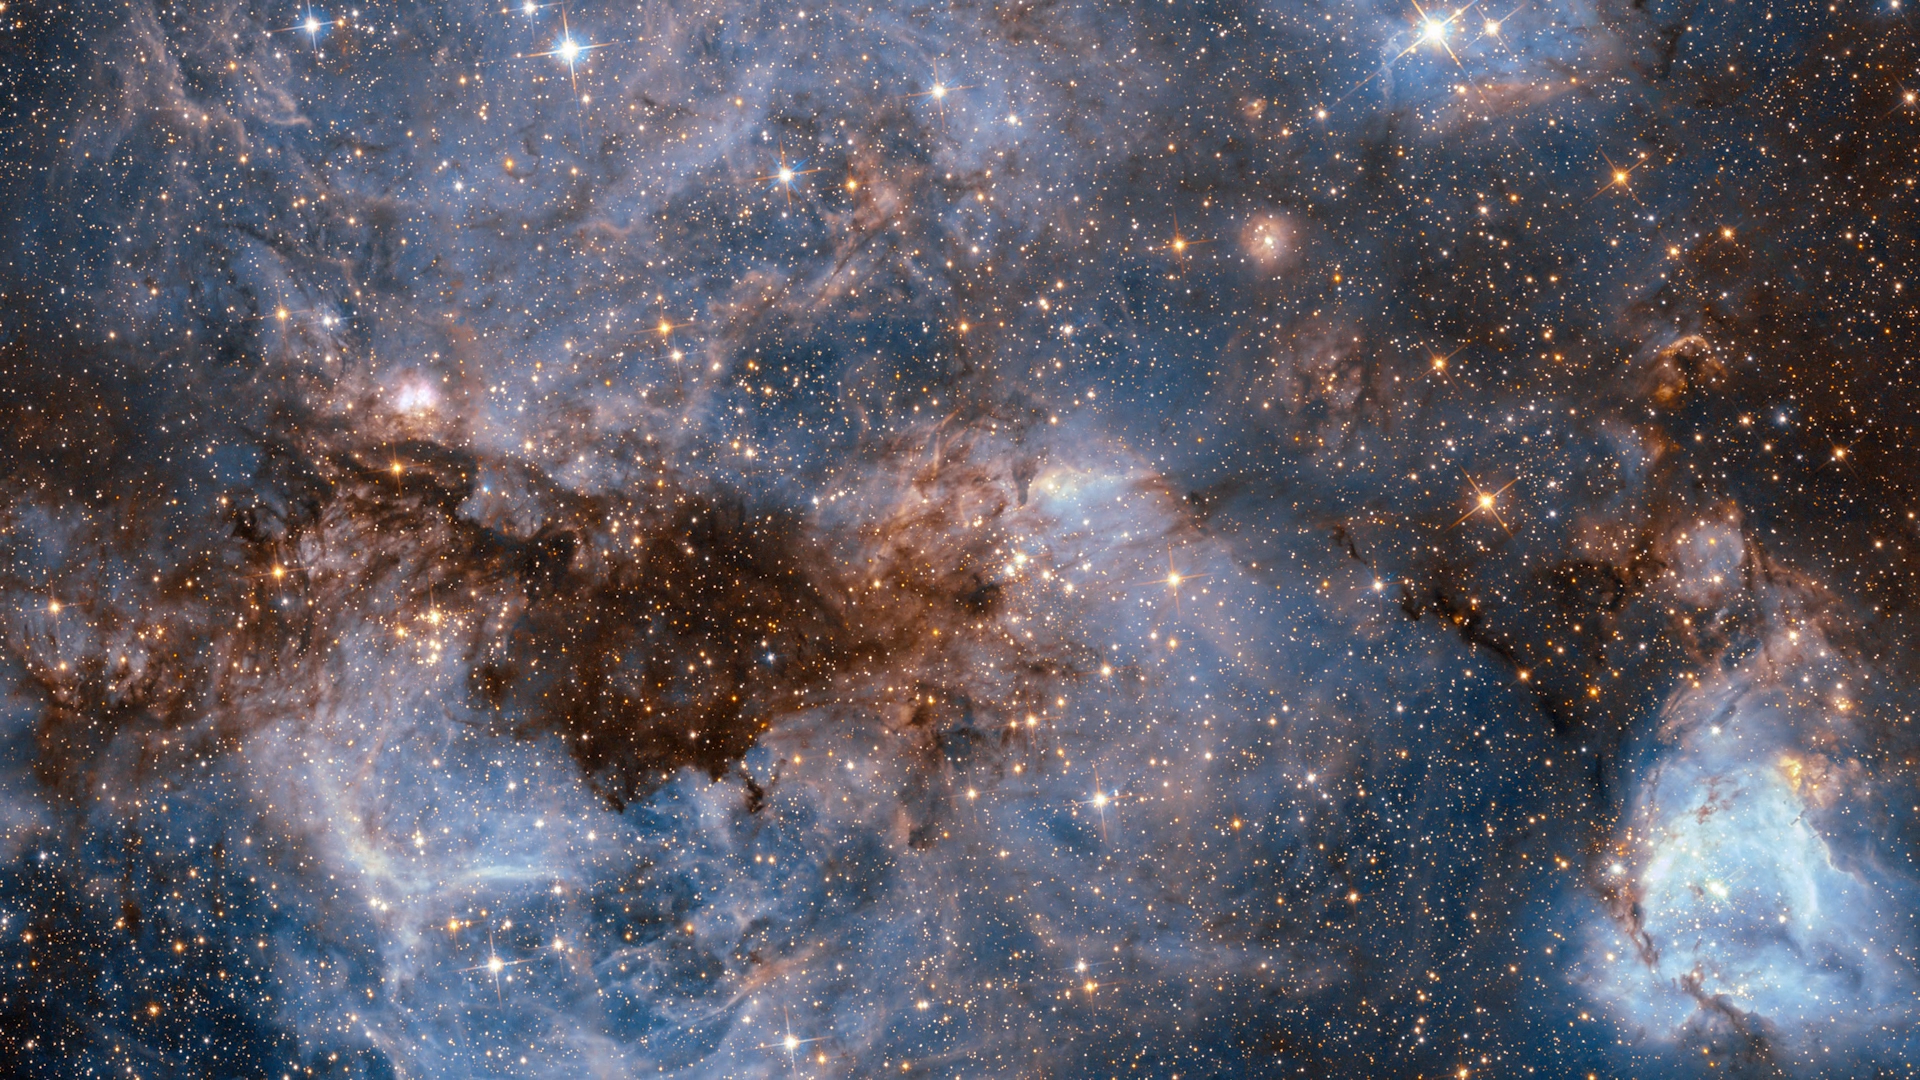

Still from Hubblecast 99: Hubble’s biggest discoveries — part 2

This is a still from Hubblecast 99.

Credit: ESA/Hubble, NASA